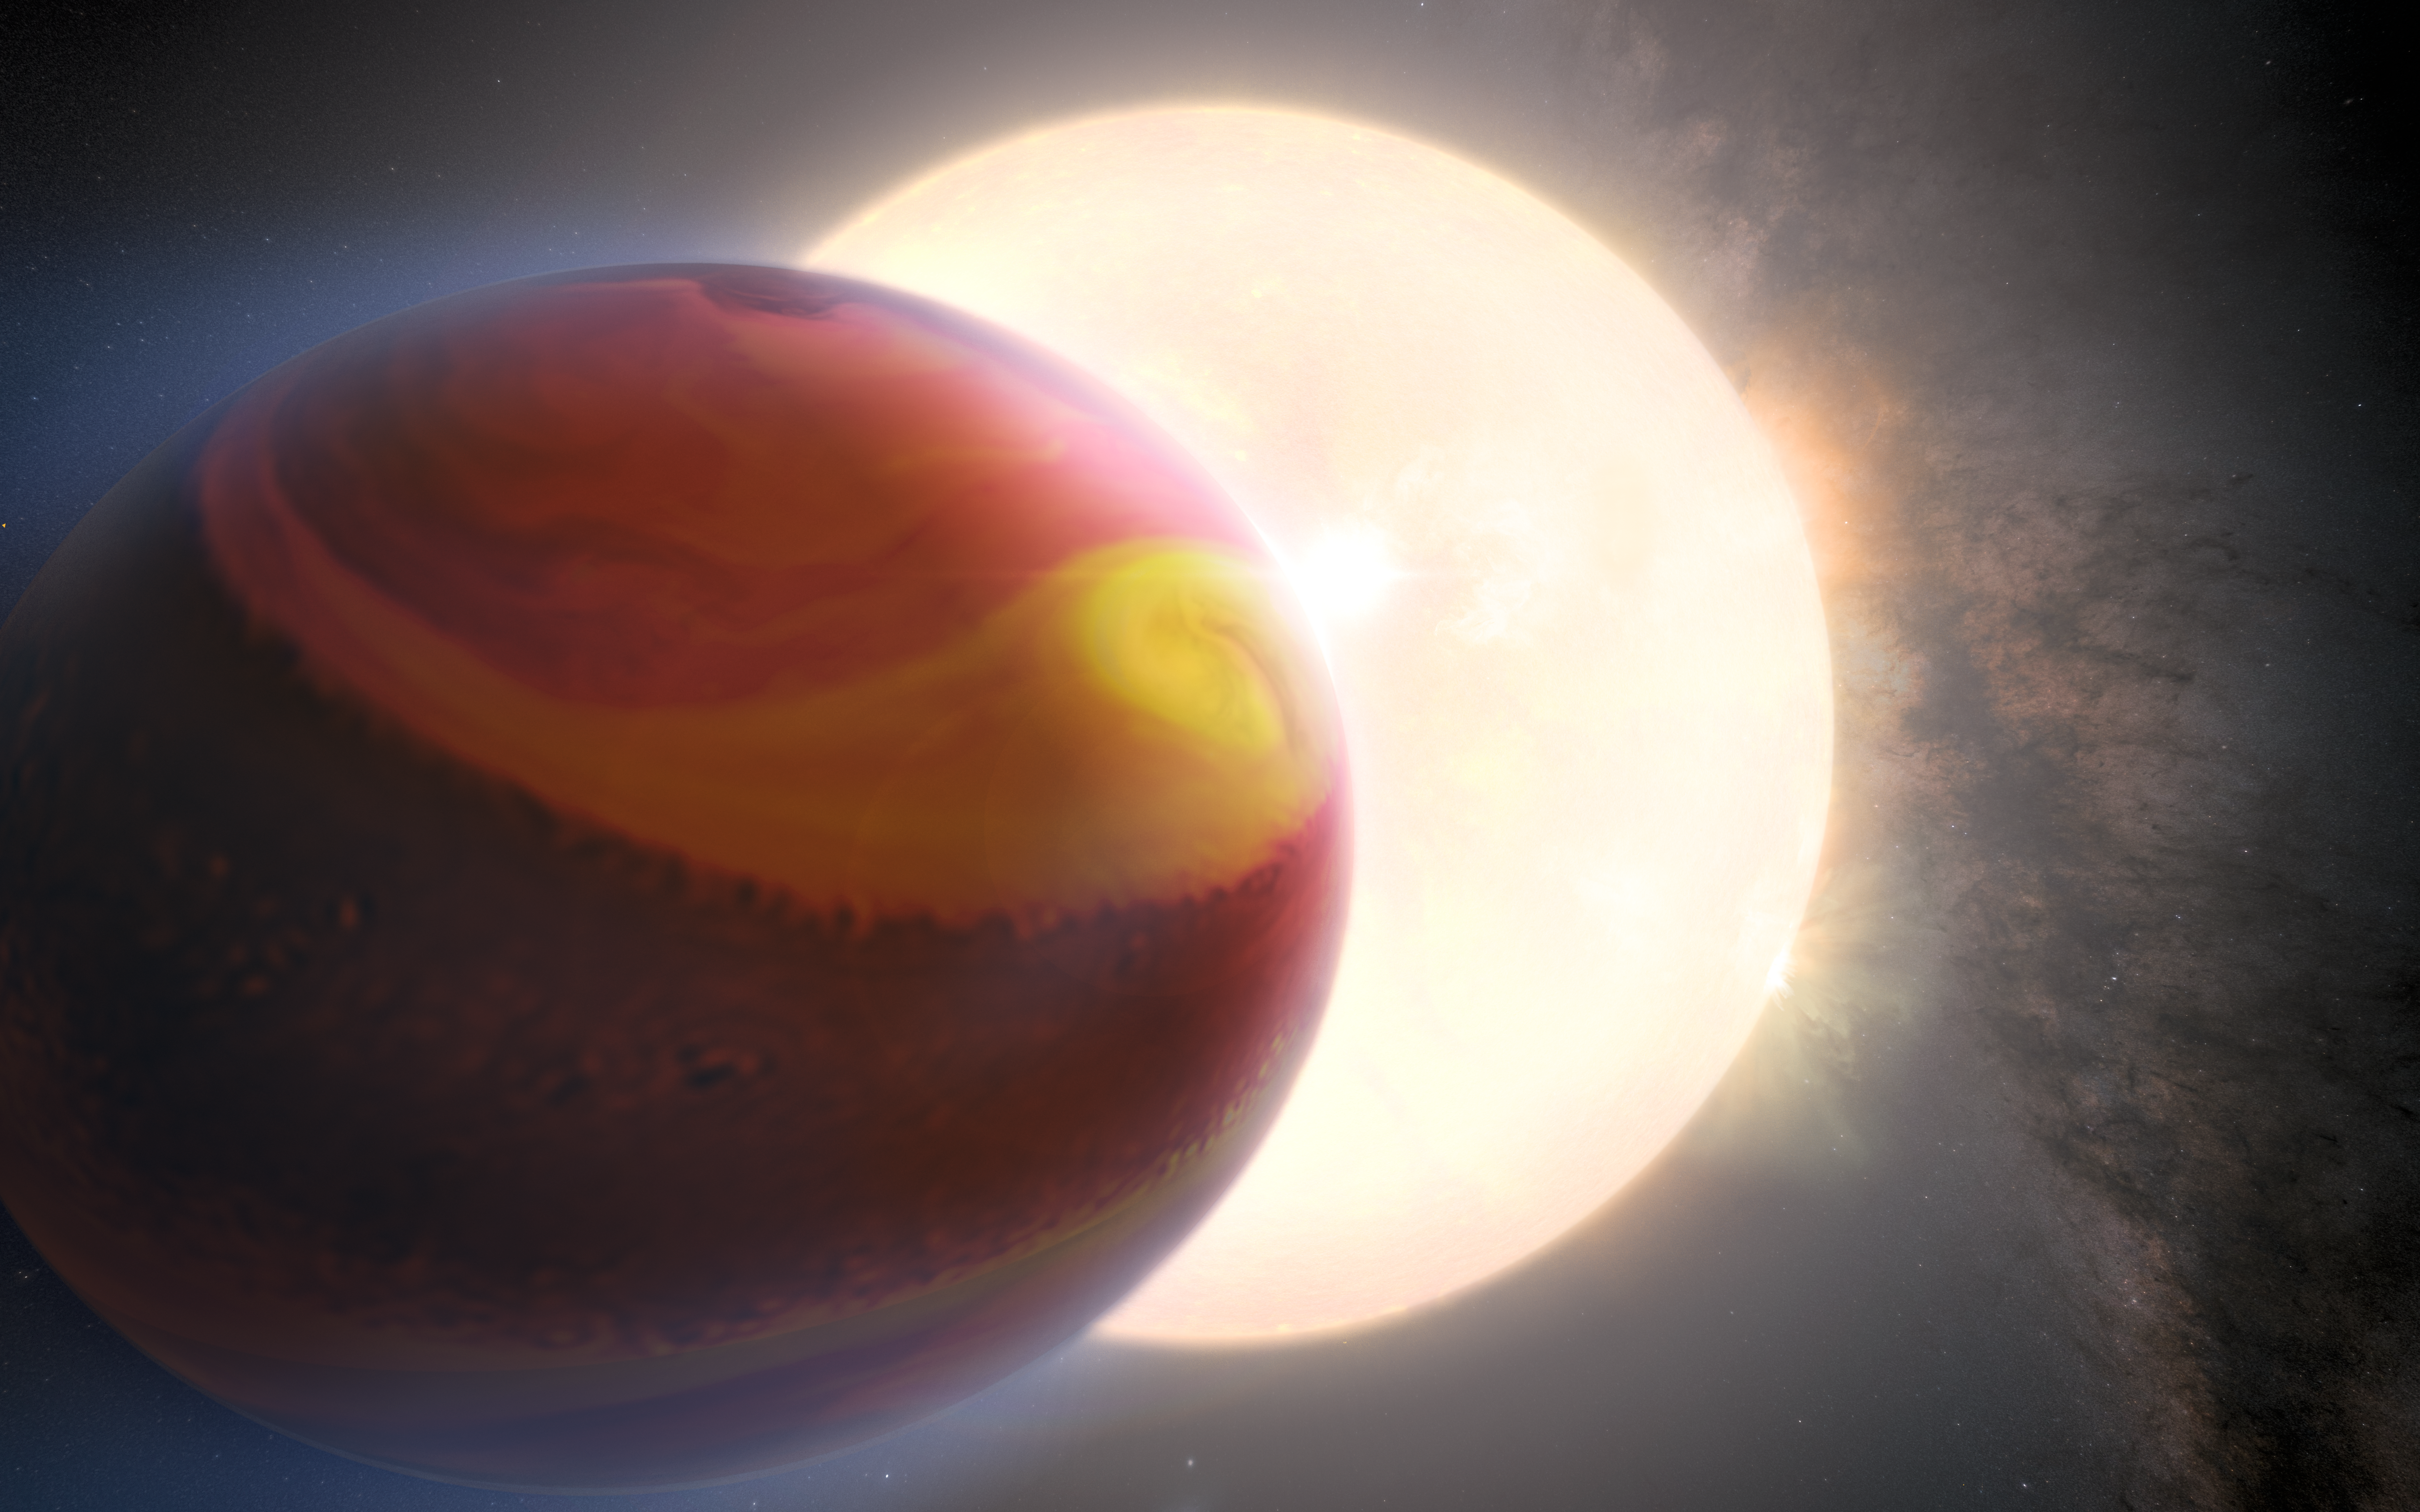

WASP 121-b (artist’s impression)

This is an artist’s impression of the exoplanet WASP 121-b, also known as Tylos. The exoplanet’s appearance is based on Hubble data of the object. Using Hubble observations, another team of scientists had previously reported the detection of heavy metals such as magnesium and iron escaping from the upper atmosphere of the ultra-hot Jupiter exoplanet, marking it as the first of such detection. The exoplanet is orbiting dangerously close to its host star, roughly 2.6% of the distance between Earth and the Sun, placing it on the verge of being ripped apart by its host star's tidal forces. The powerful gravitational forces have altered the planet's shape.

An international team of astronomers assembled and reprocessed Hubble observations of the exoplanet made in the years 2016, 2018 and 2019. This provided them with a unique dataset that allowed them not only to analyse the atmosphere of WASP 121-b, but also to compare the state of the exoplanet’s atmosphere across several years. They found clear evidence that the observations of WASP-121 b were varying in time. The team then used sophisticated modelling techniques to demonstrate that these temporal variations could be explained by weather patterns in the exoplanet's atmosphere.

Credit: NASA, ESA, Q. Changeat et al., M. Zamani (ESA/Hubble)